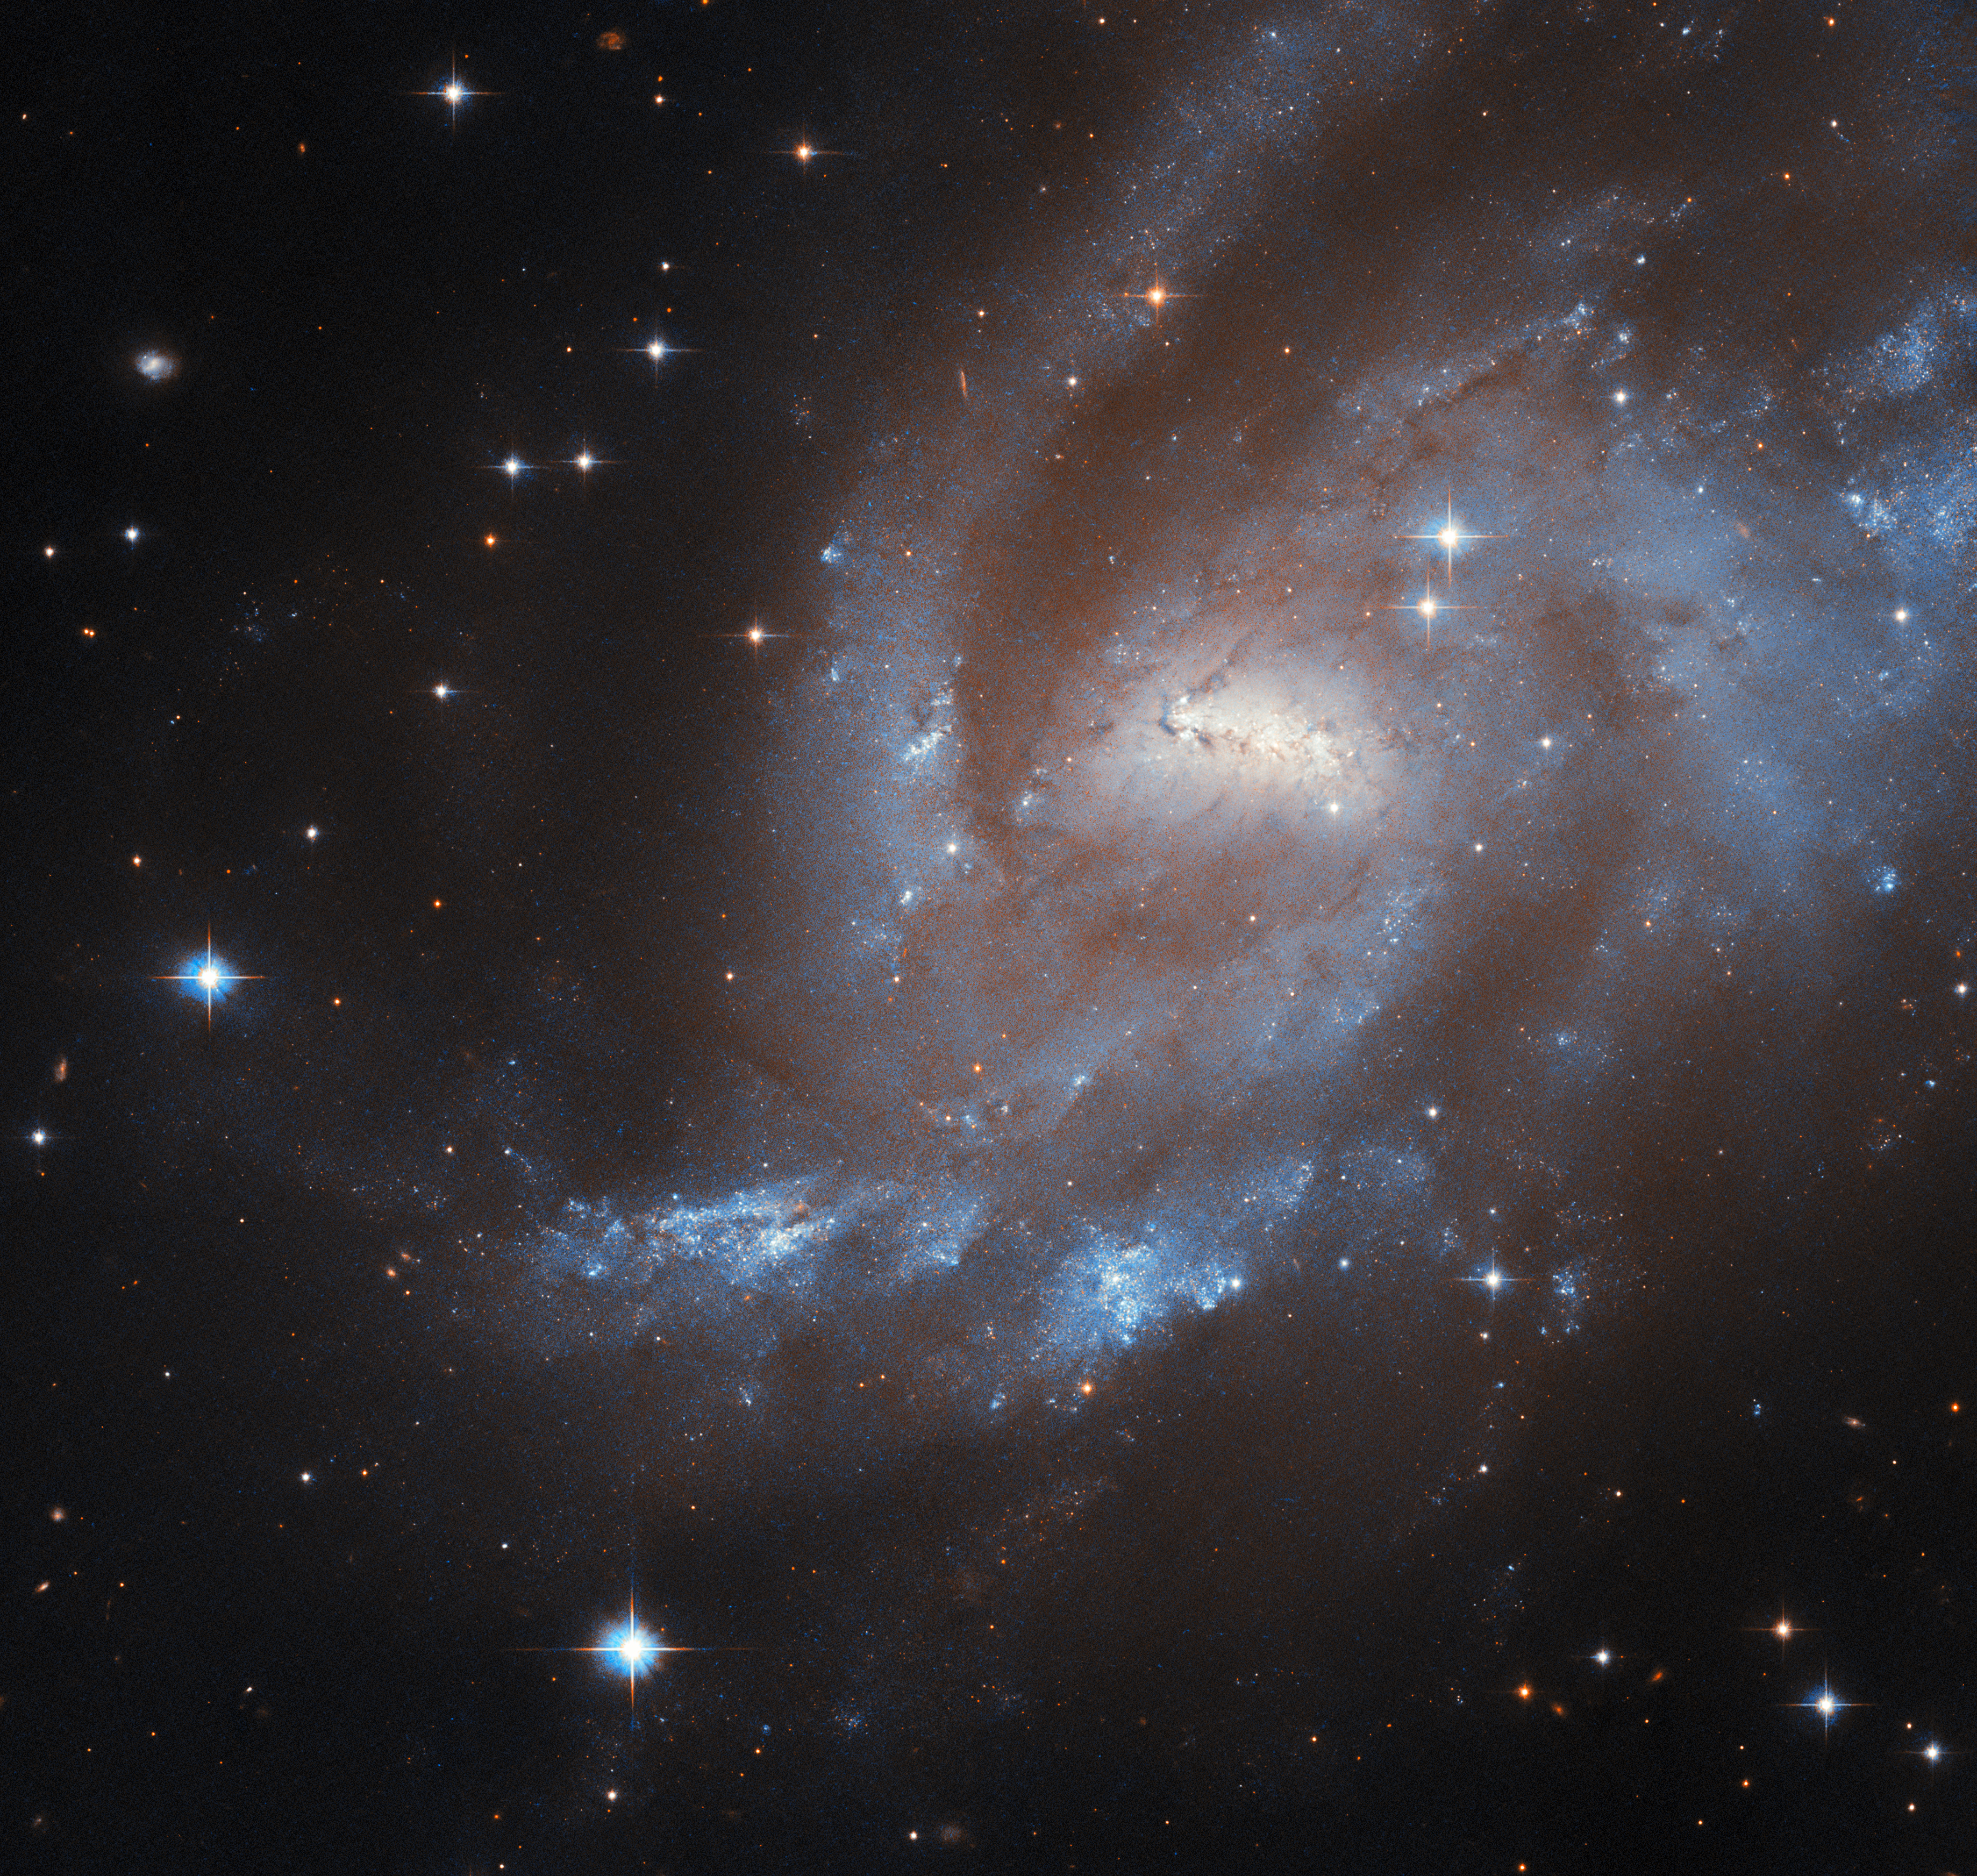

A super(nova) spiral

Resting near the centre of the northerly constellation Cepheus, high in the northern sky, is the barred spiral galaxy UGC 11861, the subject of the latest Hubble Picture of the Week.

UGC 11861 is located 69 million light-years away from Earth — which may seem a vast distance, but it’s just right for Hubble to grab this majestic shot of the galaxy’s spiral arms and the short but brightly glowing bar in its centre. Among the cloudy gases and the dark wisps of dust, this galaxy is actively forming new stars, visible in the glowing blue patches in its outer arms.

This activity has resulted in three supernova explosions being spotted in and nearby UGC 11861, in 1995, 1997 and 2011. The earlier two were both Type II supernovae, a kind which results from the collapse of a massive star at the end of its life. This Hubble image was made from data collected to study Type II supernovae and their environments.

Credit: ESA/Hubble & NASA, C. Kilpatrick